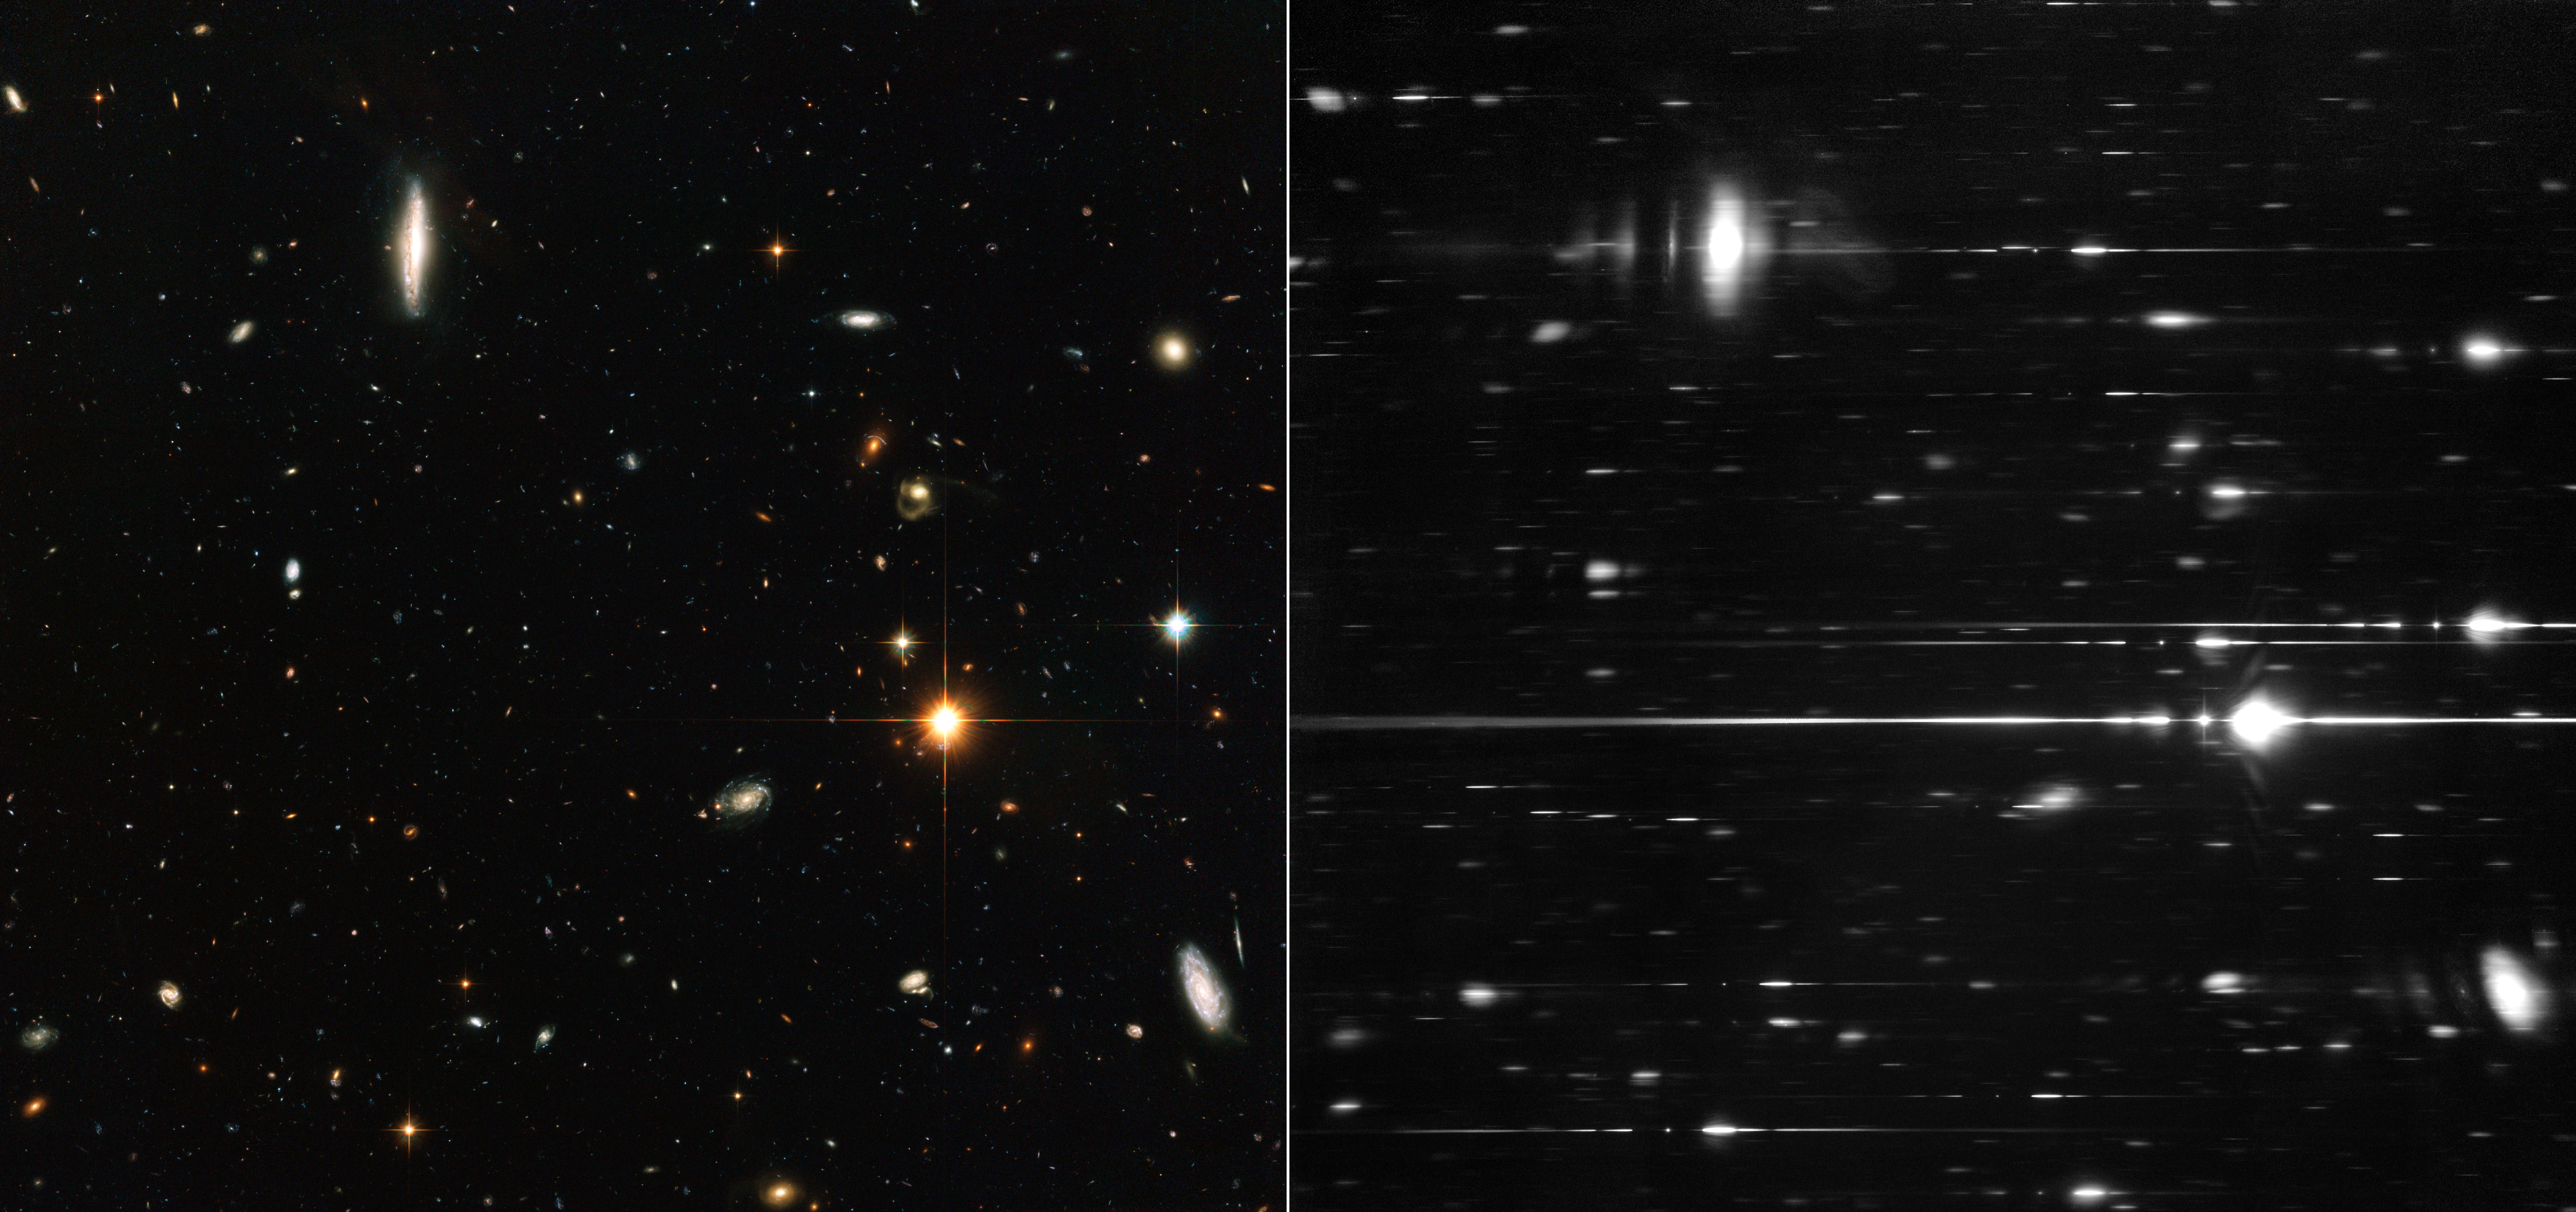

Hubble direct and grism observations

This Hubble ACS photo (left) shows some of the most distant galaxies ever imaged by humankind. Viewing the same galaxies through a grism (right) splits the light up revealing the distribution of brightness and colour in the stars. This allows scientists to deduce facts about their chemical composition and distance from Earth. Artist Tim Otto Roth has used data from ACS grism studies of these galaxies to produce a dazzling laser installation, projected onto Venice’s Palazzo Franchetti.

Credit: ESA/Hubble and NASA